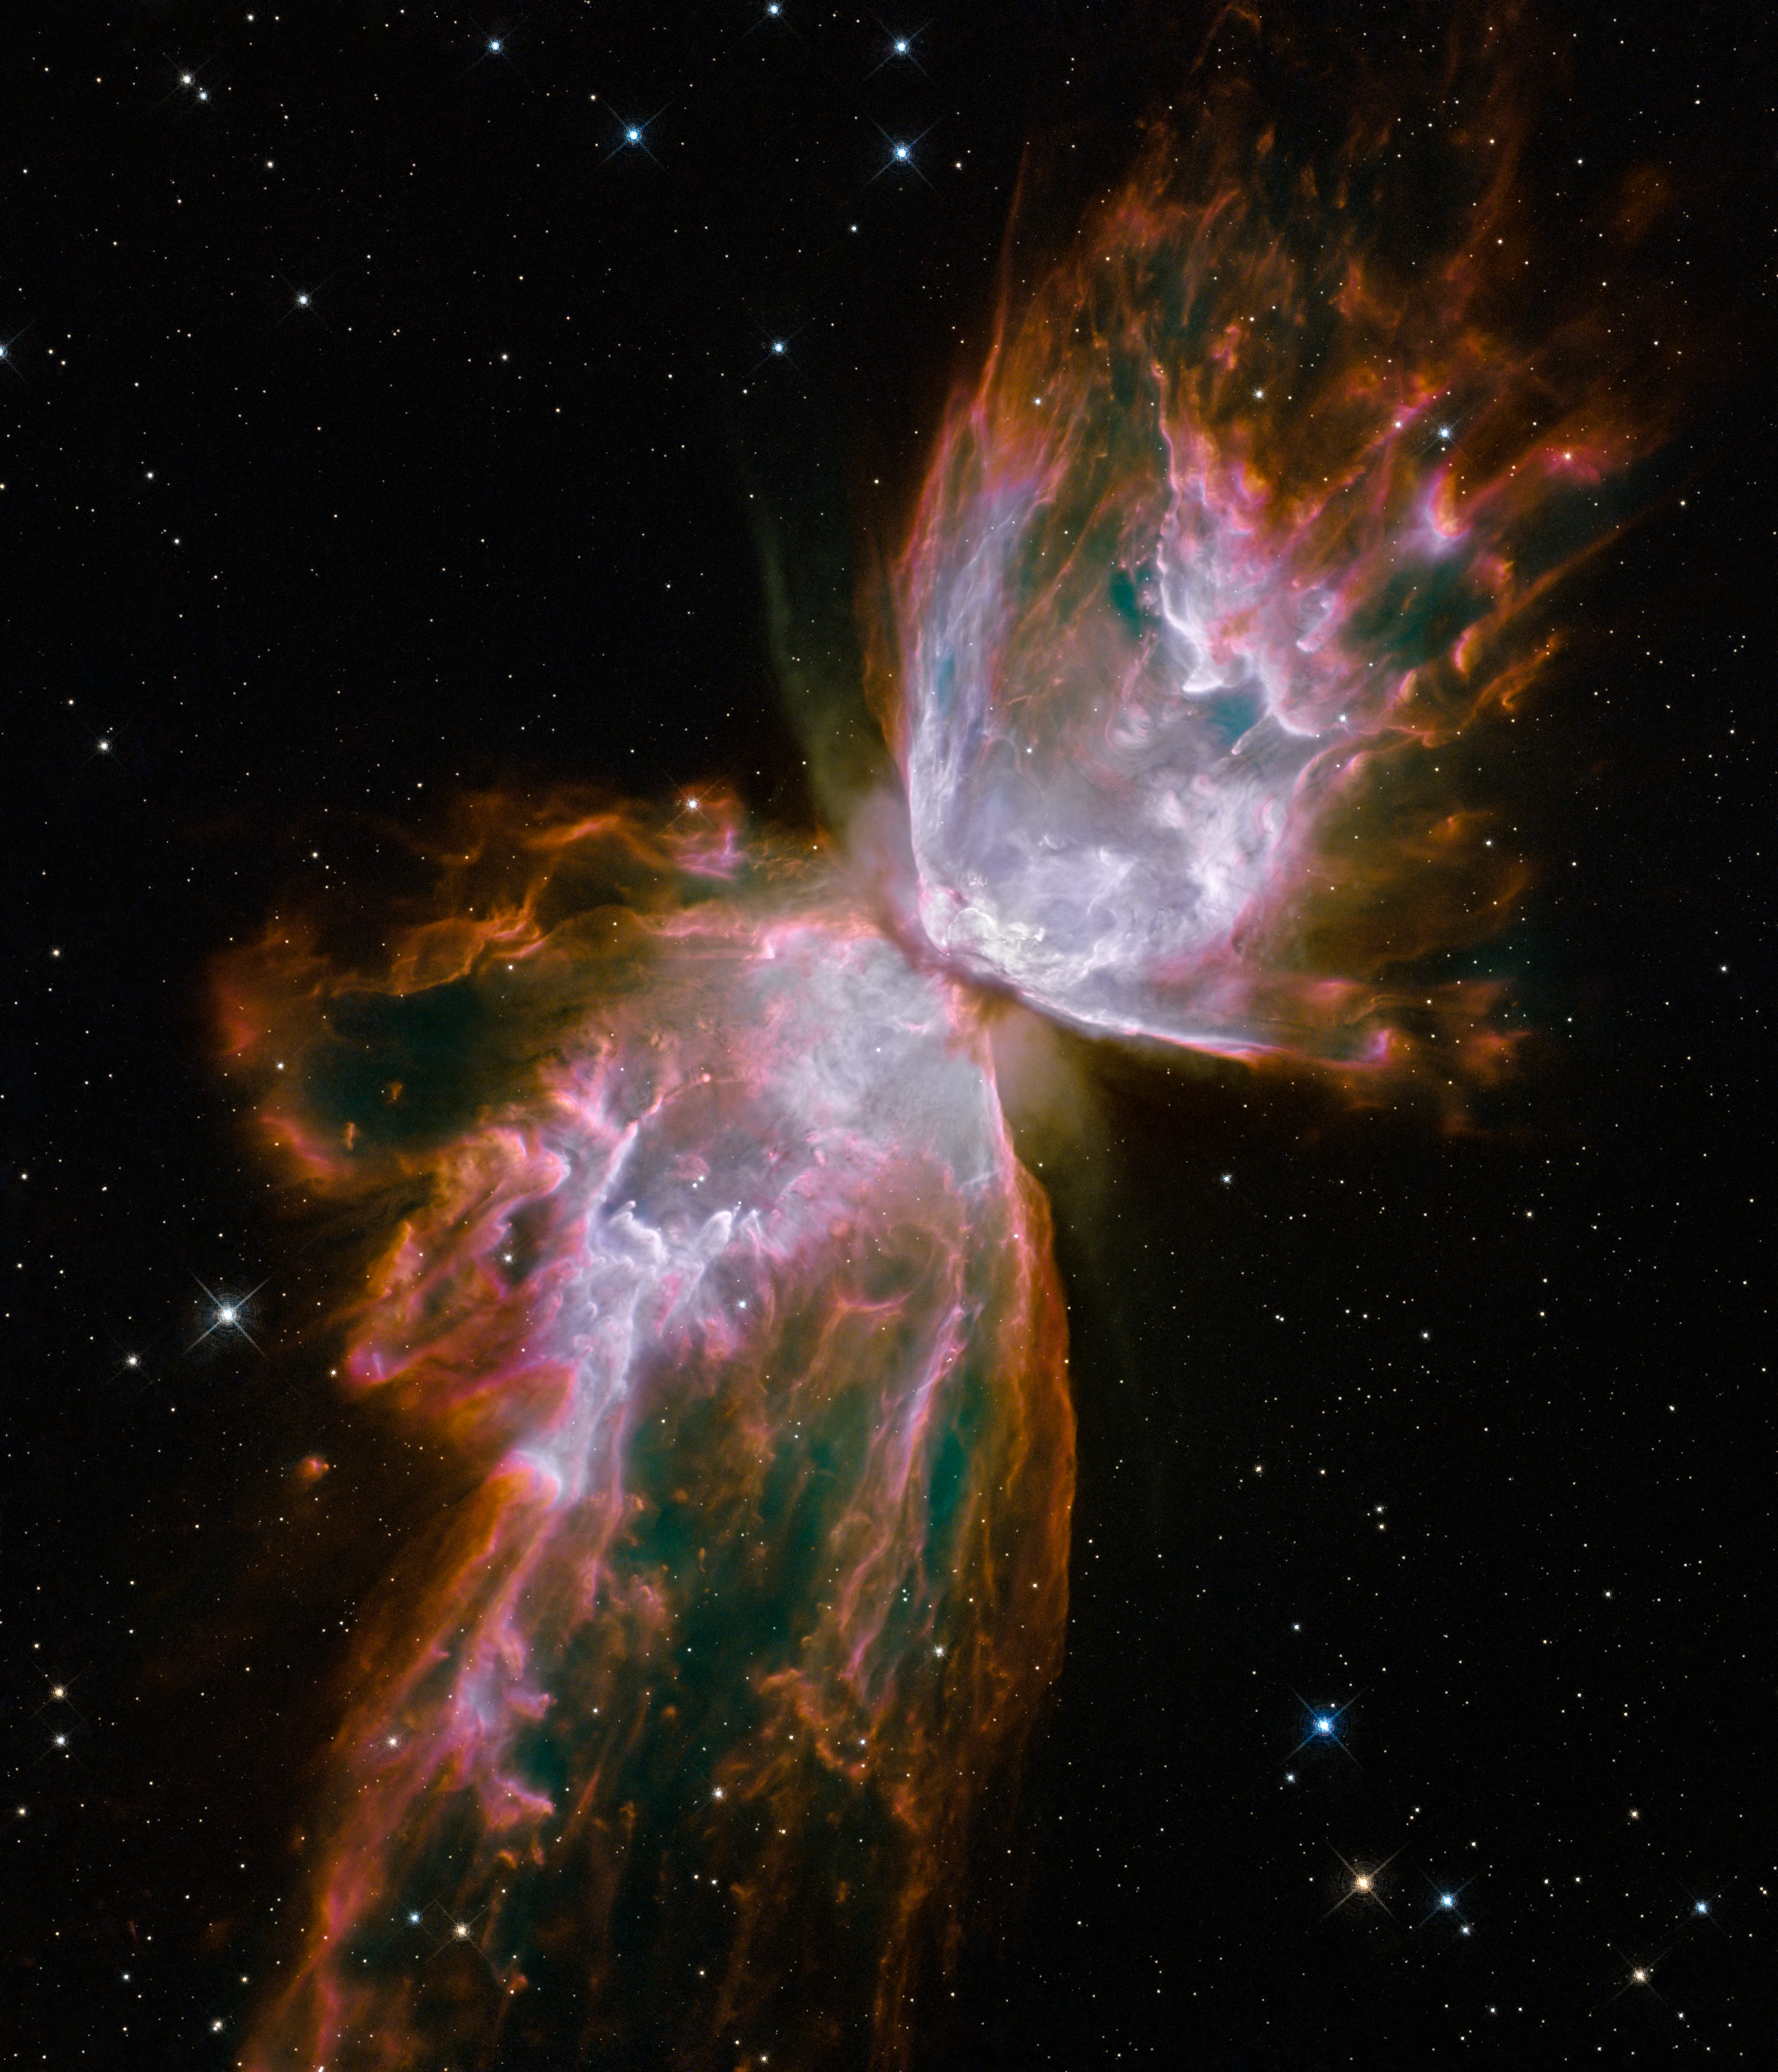

Butterfly emerges from stellar demise in planetary nebula NGC 6302

This celestial object looks like a delicate butterfly. But it is far from serene.

What resemble dainty butterfly wings are actually roiling cauldrons of gas heated to nearly 20 000 degrees Celsius. The gas is tearing across space at more than 950 000 kilometres per hour — fast enough to travel from Earth to the Moon in 24 minutes!

A dying star that was once about five times the mass of the Sun is at the centre of this fury. It has ejected its envelope of gases and is now unleashing a stream of ultraviolet radiation that is making the cast-off material glow. This object is an example of a planetary nebula, so-named because many of them have a round appearance resembling that of a planet when viewed through a small telescope.

The Wide Field Camera 3 (WFC3), a new camera aboard the NASA/ESA Hubble Space Telescope, snapped this image of the planetary nebula, catalogued as NGC 6302, but more popularly called the Bug Nebula or the Butterfly Nebula. WFC3 was installed by NASA astronauts in May 2009, during the Servicing Mission to upgrade and repair the 19-year-old Hubble.

NGC 6302 lies within our Milky Way galaxy, roughly 3800 light-years away in the constellation of Scorpius. The glowing gas is the star's outer layers, expelled over about 2200 years. The "butterfly" stretches for more than two light-years, which is about half the distance from the Sun to the nearest star, Proxima Centauri.

The central star itself cannot be seen, because it is hidden within a doughnut-shaped ring of dust, which appears as a dark band pinching the nebula in the centre. The thick dust belt constricts the star's outflow, creating the classic "bipolar" or hourglass shape displayed by some planetary nebulae.

The star's surface temperature is estimated to be over 220 000 degrees Celsius, making it one of the hottest known stars in our galaxy. Spectroscopic observations made with ground-based telescopes show that the gas is roughly 20 000 degrees Celsius, which is unusually hot compared to a typical planetary nebula.

The WFC3 image reveals a complex history of ejections from the star. The star first evolved into a huge red giant, with a diameter of about 1000 times that of our Sun. It then lost its extended outer layers. Some of this gas was cast off from its equator at a relatively slow speed, perhaps as low as 32 000 kilometres per hour, creating the doughnut-shaped ring. Other gas was ejected perpendicular to the ring at higher speeds, producing the elongated "wings" of the butterfly-shaped structure. Later, as the central star heated up, a much faster stellar wind, a stream of charged particles travelling at more than 3.2 million kilometres per hour, ploughed through the existing wing-shaped structure, further modifying its shape.

The image also shows numerous finger-like projections pointing back to the star, which may mark denser blobs in the outflow that have resisted the pressure from the stellar wind.

The nebula's reddish outer edges are largely due to light emitted by nitrogen, which marks the coolest gas visible in the picture. WFC3 is equipped with a wide variety of filters that isolate light emitted by various chemical elements, allowing astronomers to infer properties of the nebular gas, such as its temperature, density and composition.

The white-coloured regions are areas where light is emitted by sulphur. These are regions where fast-moving gas overtakes and collides with slow-moving gas that left the star at an earlier time, producing shock waves in the gas (the bright white edges on the sides facing the central star). The white blob with the crisp edge at upper right is an example of one of those shock waves.

NGC 6302 was imaged on 27 July 2009 with Hubble's Wide Field Camera 3 in ultraviolet and visible light. Filters that isolate emissions from oxygen, helium, hydrogen, nitrogen and sulphur from the planetary nebula were used to create this composite image.

These Hubble observations of the planetary nebula NGC 6302 are part of the Hubble Servicing Mission 4 Early Release Observations.

Credit: NASA, ESA and the Hubble SM4 ERO Team